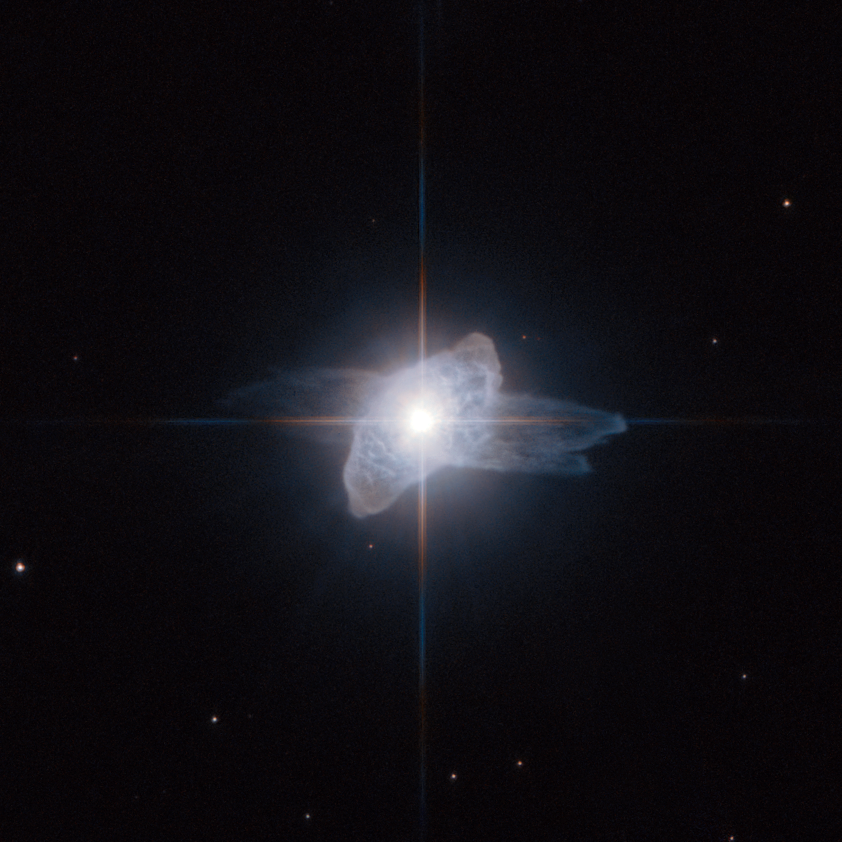

A dying star starts shedding its skin

This Hubble Space Telescope picture captures a brief but beautiful phase late in the life of a star. The curious cloud around this bright star is called IRAS 19475+3119. It lies in the constellation of Cygnus (the Swan) about 15 000 light-years from Earth in the plane of our Milky Way galaxy.

As stars similar to the Sun age they swell into red giant stars and when this phase ends they start to shed their atmospheres into space. The surroundings become rich in dust and the star is still relatively cool. At this point the cloud shines by reflecting the brilliant light of the central star and the warm dust gives off lots of infrared radiation. It was this infrared radiation that was detected by the IRAS satellite in 1983 and brought the object to the attention of astronomers. Jets from the star may create strange hollow lobes, and in the case of IRAS 19475+3119 two such features appear at different angles. These curious objects are rare and short-lived.

As the star continues to shed material the hotter core is gradually revealed. The intense ultraviolet radiation causes the surrounding gas to glow brilliantly and a planetary nebula is born. The objects that come before planetary nebulae, such as IRAS 19475+3119, are known as preplanetary nebulae, or protoplanetary nebulae. They have nothing to do with planets — the name planetary nebula arose as they looked rather like the outer planets Uranus and Neptune when seen through small telescopes.

This image was created from images taken using the High Resolution Channel of the Hubble Space Telescope’s Advanced Camera for Surveys. The red light was captured through a filter letting through yellow and red light (F606W) and the blue was recorded through a standard blue filter (F435W). The green layer of the image was created by combining the blue and red images. The total exposure times were 24 s and 245 s for red and blue respectively. The field of view is about twenty arcseconds across.

Credit: ESA/Hubble and NASA.